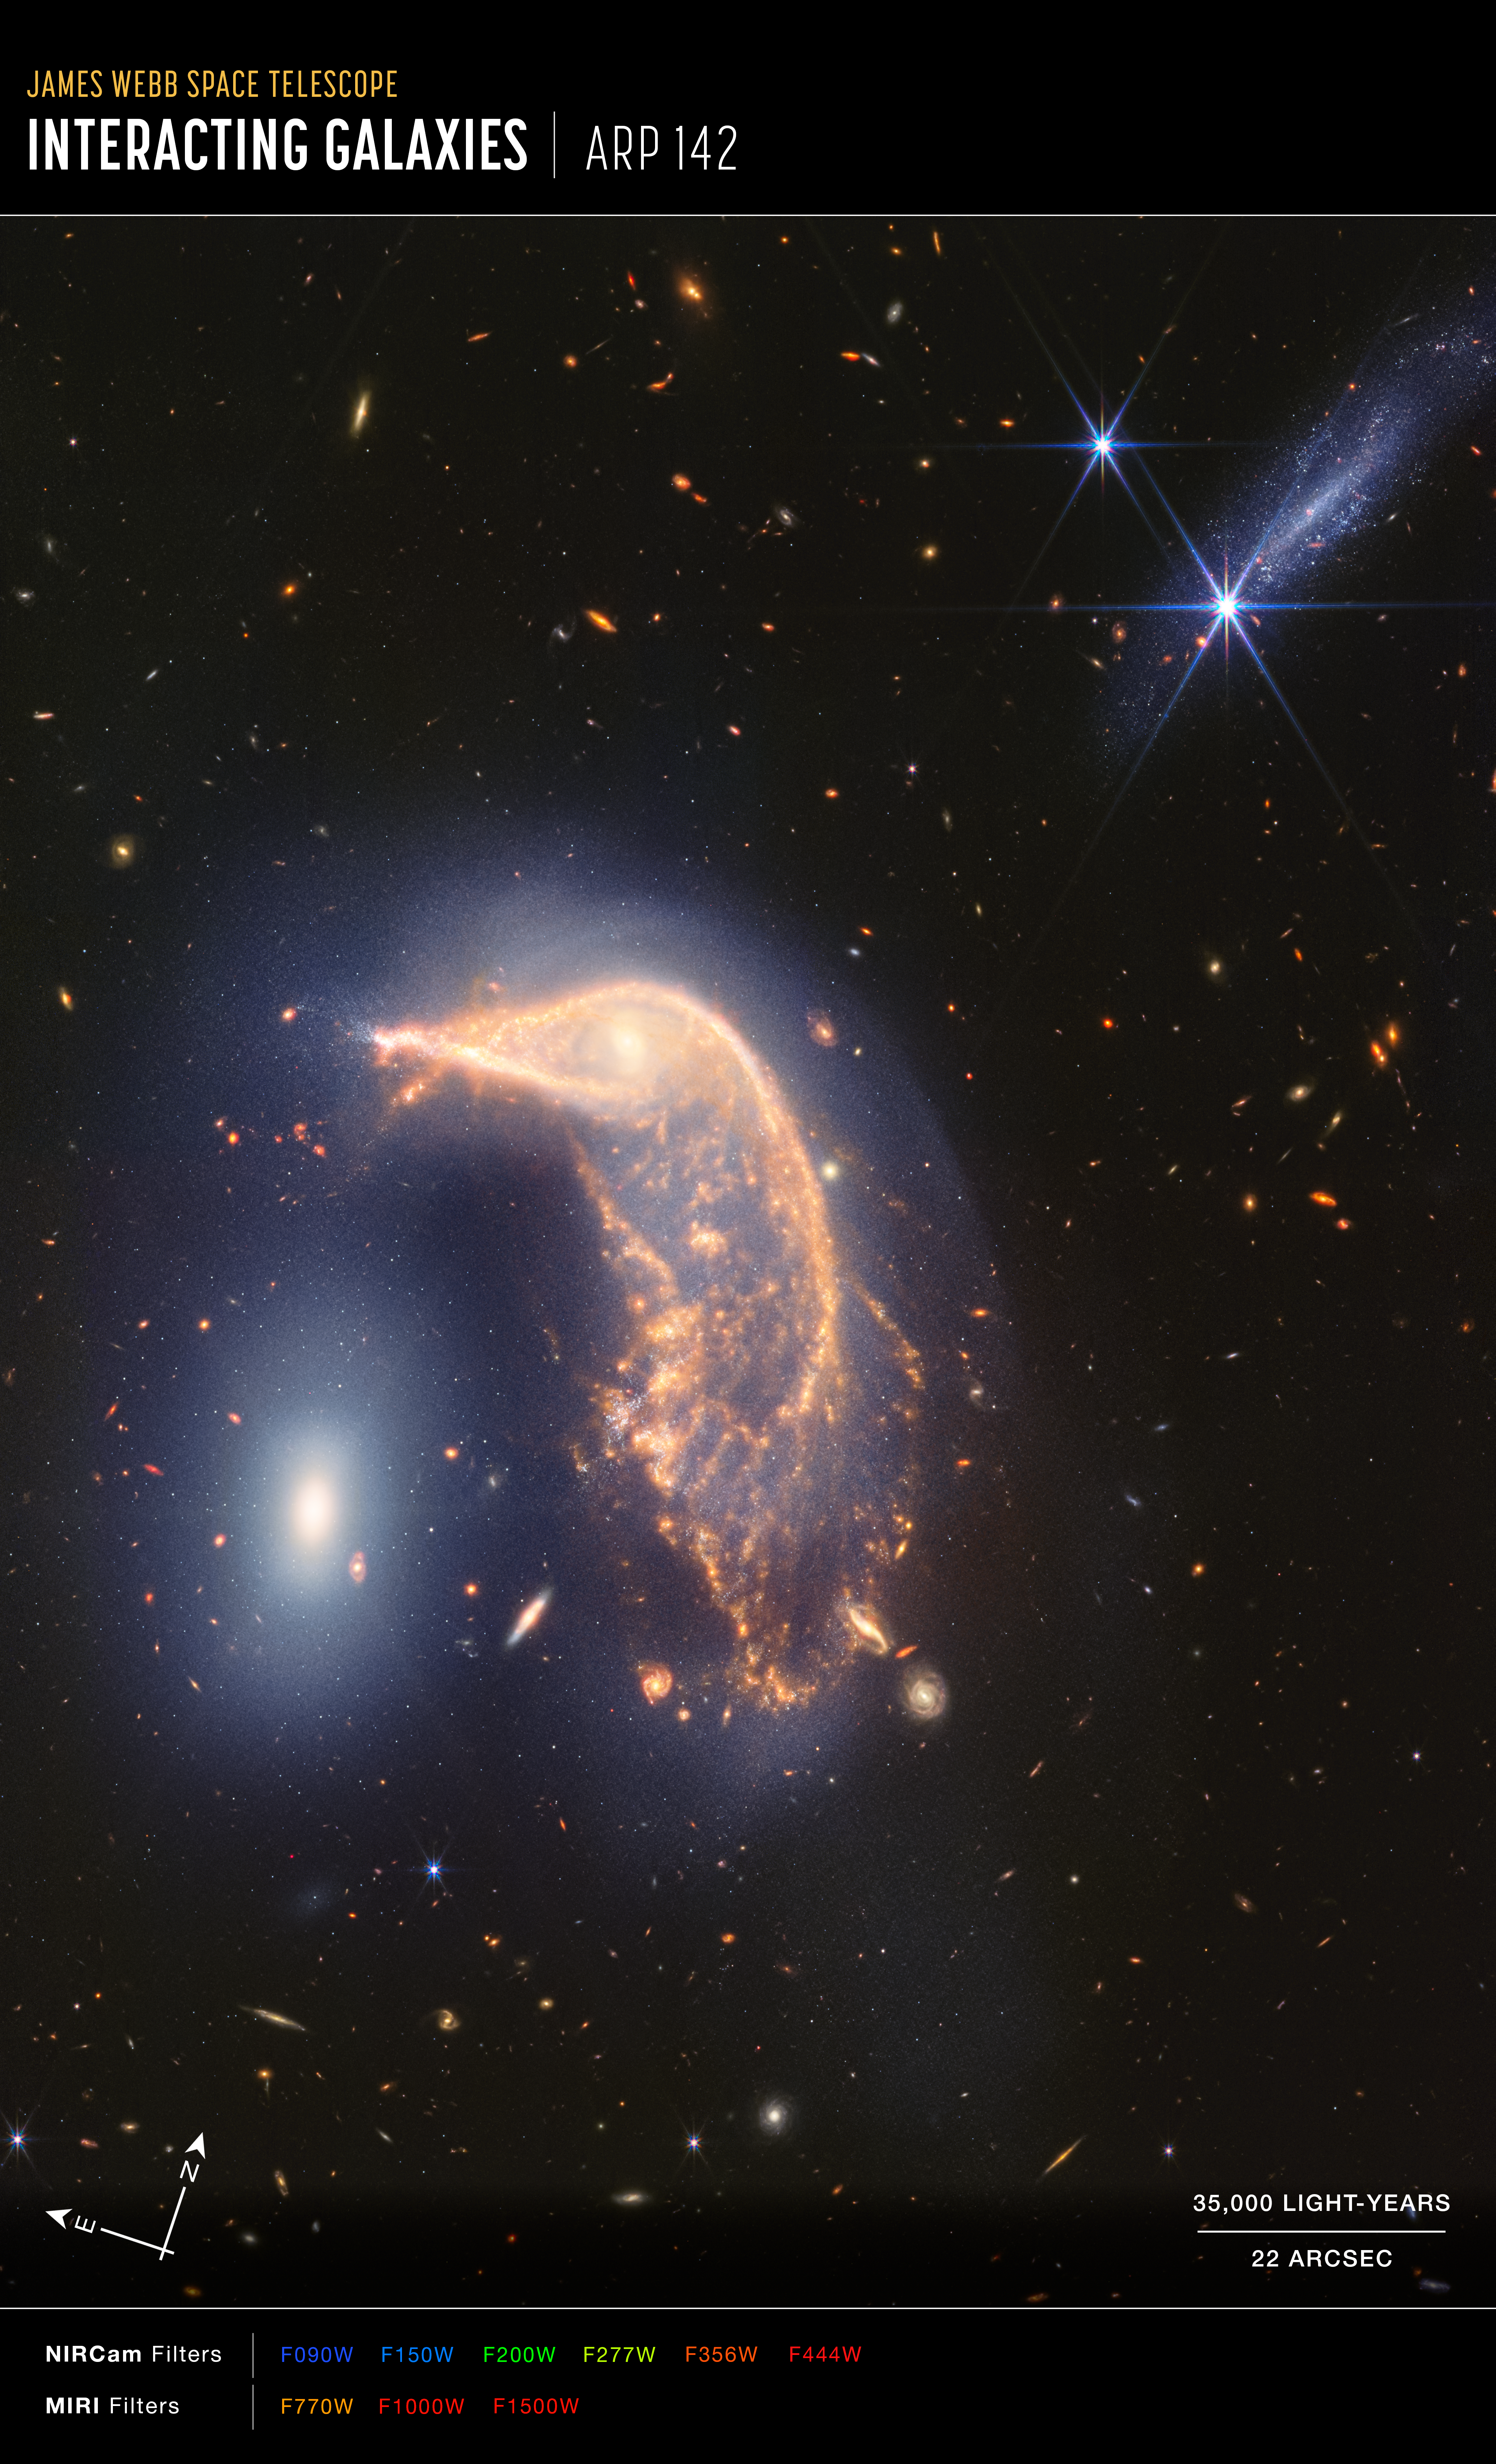

Interacting galaxies Arp 142 (NIRCam and MIRI image, annotated)

This image of interacting galaxies Arp 142, captured by the James Webb Space Telescope’s NIRCam (Near-InfraRed Camera) and MIRI (Mid-InfraRed Instrument), shows compass arrows, a scale bar, and a colour key for reference.

The north and east compass arrows show the orientation of the image on the sky. Note that the relationship between north and east on the sky (as seen from below) is flipped relative to direction arrows on a map of the ground (as seen from above).

The scale bar is labelled in light-years, which is the distance that light travels in one Earth-year. (It takes three years for light to travel a distance equal to the length of the scale bar.) One light-year is equal to about 9.46 trillion kilometres.

The scale bar is also labelled in arcseconds, which is a measure of angular distance on the sky. One arcsecond is equal to an angular measurement of 1/3600 of one degree. There are 60 arcminutes in a degree and 60 arcseconds in an arcminute. (The full Moon has an angular diameter of about 30 arcminutes.) The actual size of an object that covers one arcsecond on the sky depends on its distance from the telescope.

This image shows invisible near- and mid-infrared wavelengths of light that have been translated into visible-light colours. The colour key shows which NIRCam and MIRI filters were used when collecting the light. The name of each filter is the visible light colour used to represent the infrared light that passes through that filter.

Credit: NASA, ESA, CSA, STScI